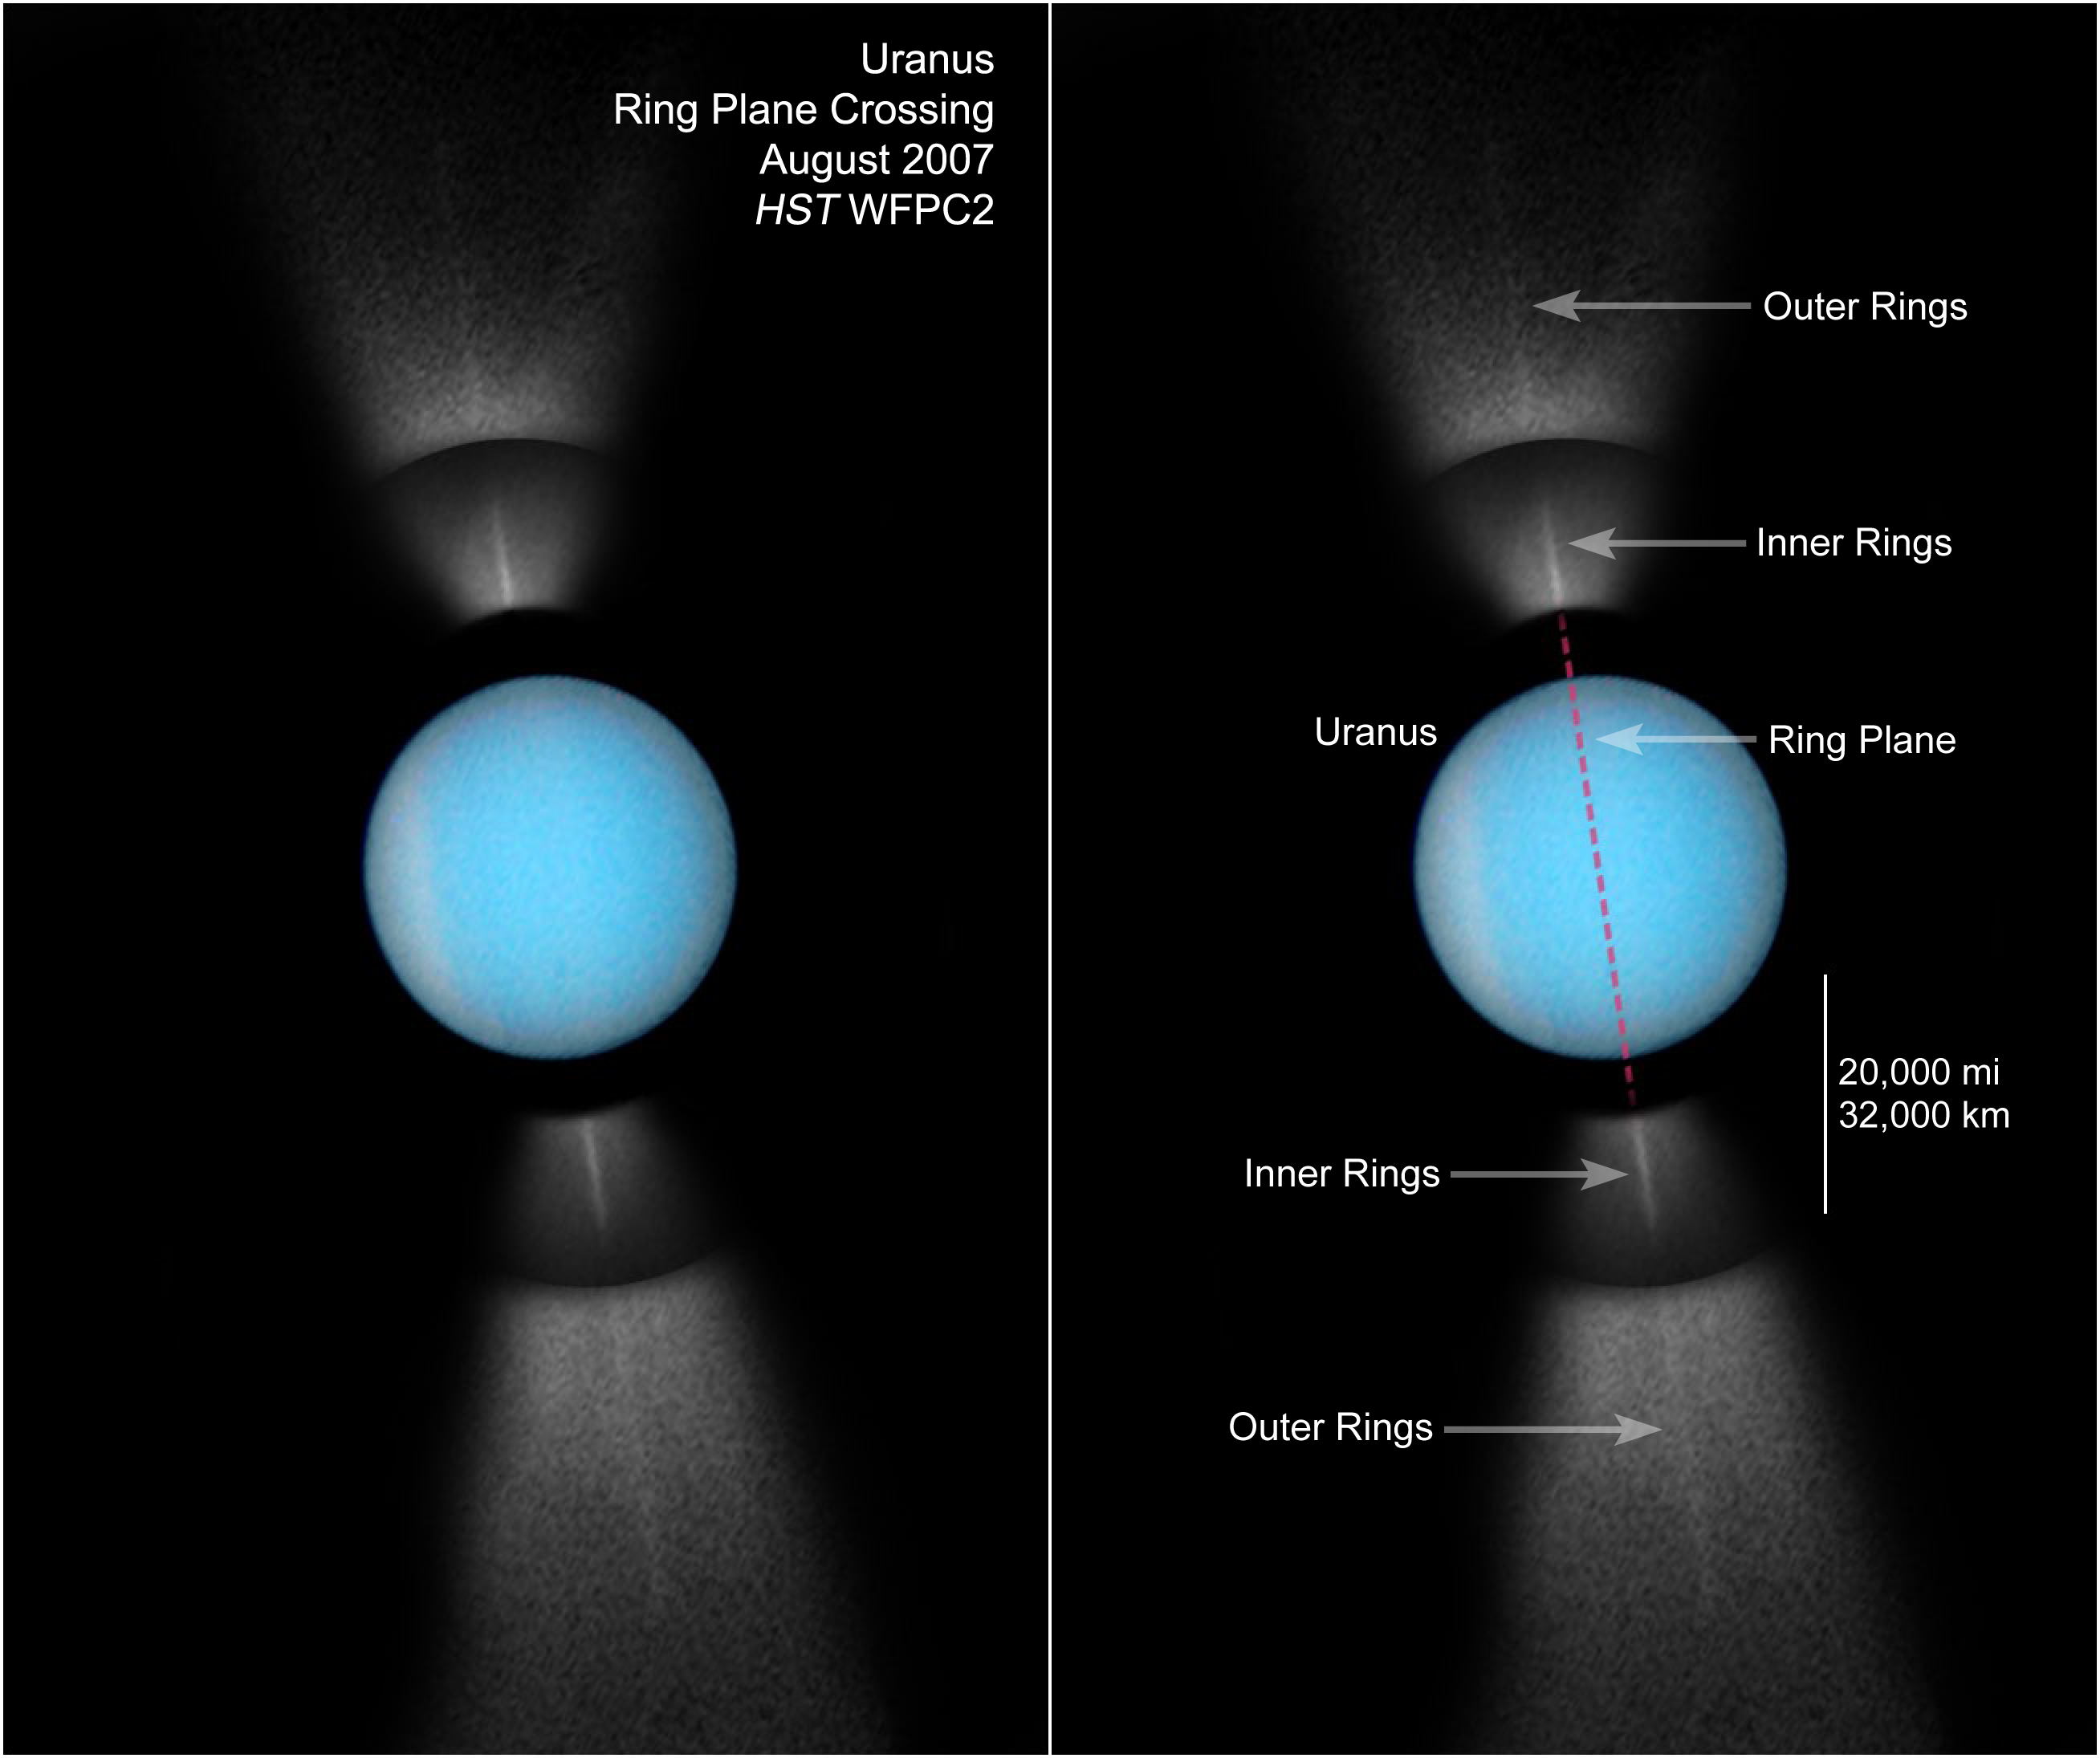

Hubble Captures Full View of Uranus' Rings on Edge

NASA's Hubble Space Telescope captures a rare view of the entire ring system of the planet Uranus, tilted edge-on to Earth.

The rings were photographed with Hubble's Wide Field Planetary Camera 2 on August 14, 2007.

Credit: NASA, ESA, M. Showalter (SETI Institute) and Z. Levay (STScI)